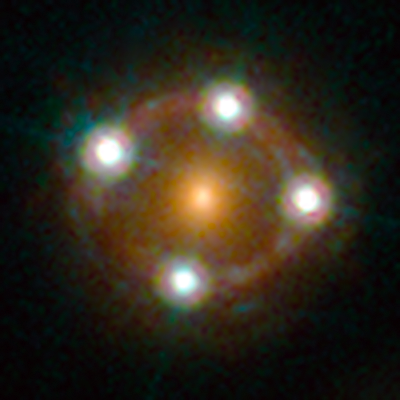

Lensed quasar

HE0435-1223 is among the five best lensed quasars discovered to date. The foreground galaxy creates four almost evenly distributed images of the distant quasar around it.

Credit: ESA/Hubble, NASA, Suyu et al.